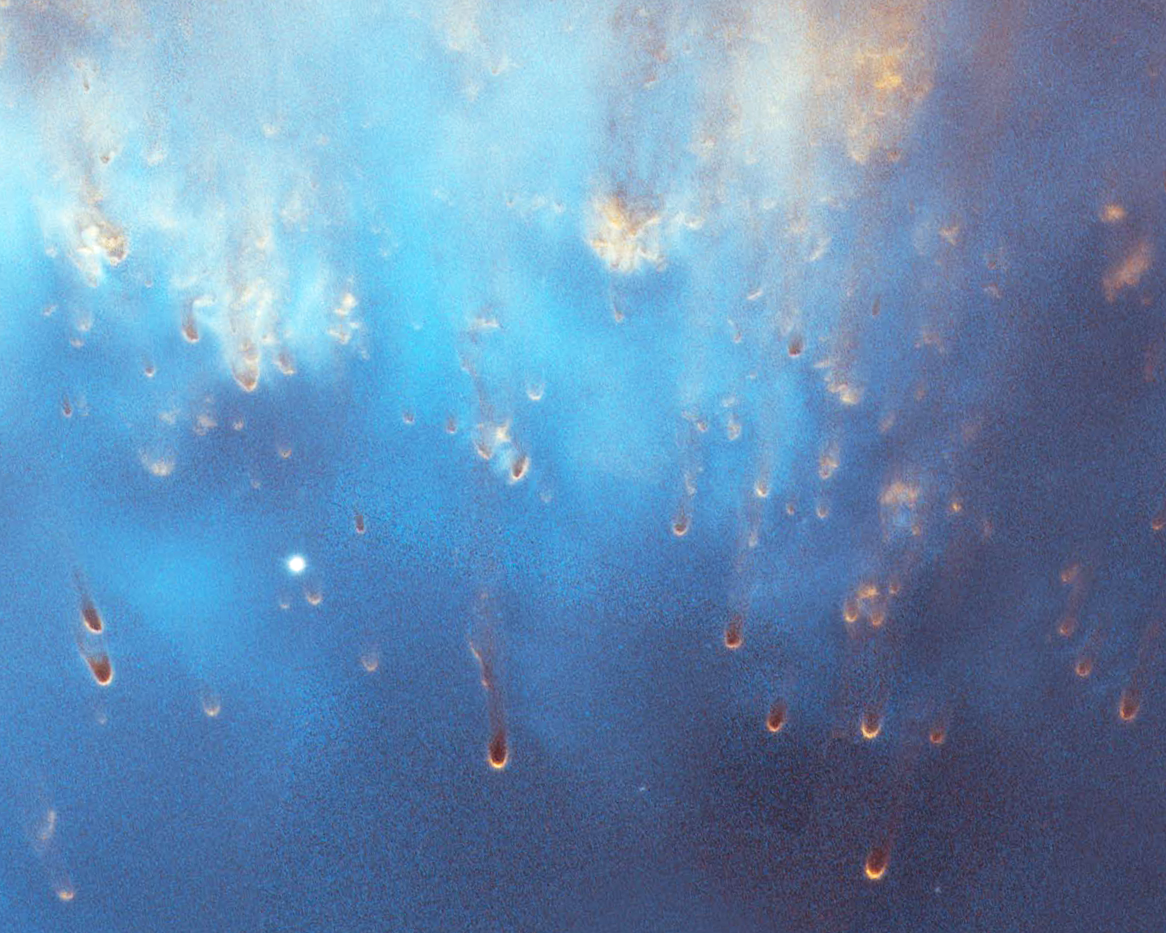

Helix Nebula: Detail Image 3

Detailed image of the Helix Nebula.

Credit: NASA, NOAO, ESA, the Hubble Helix Nebula Team, M. Meixner (STScI), and T.A. Rector (NRAO).